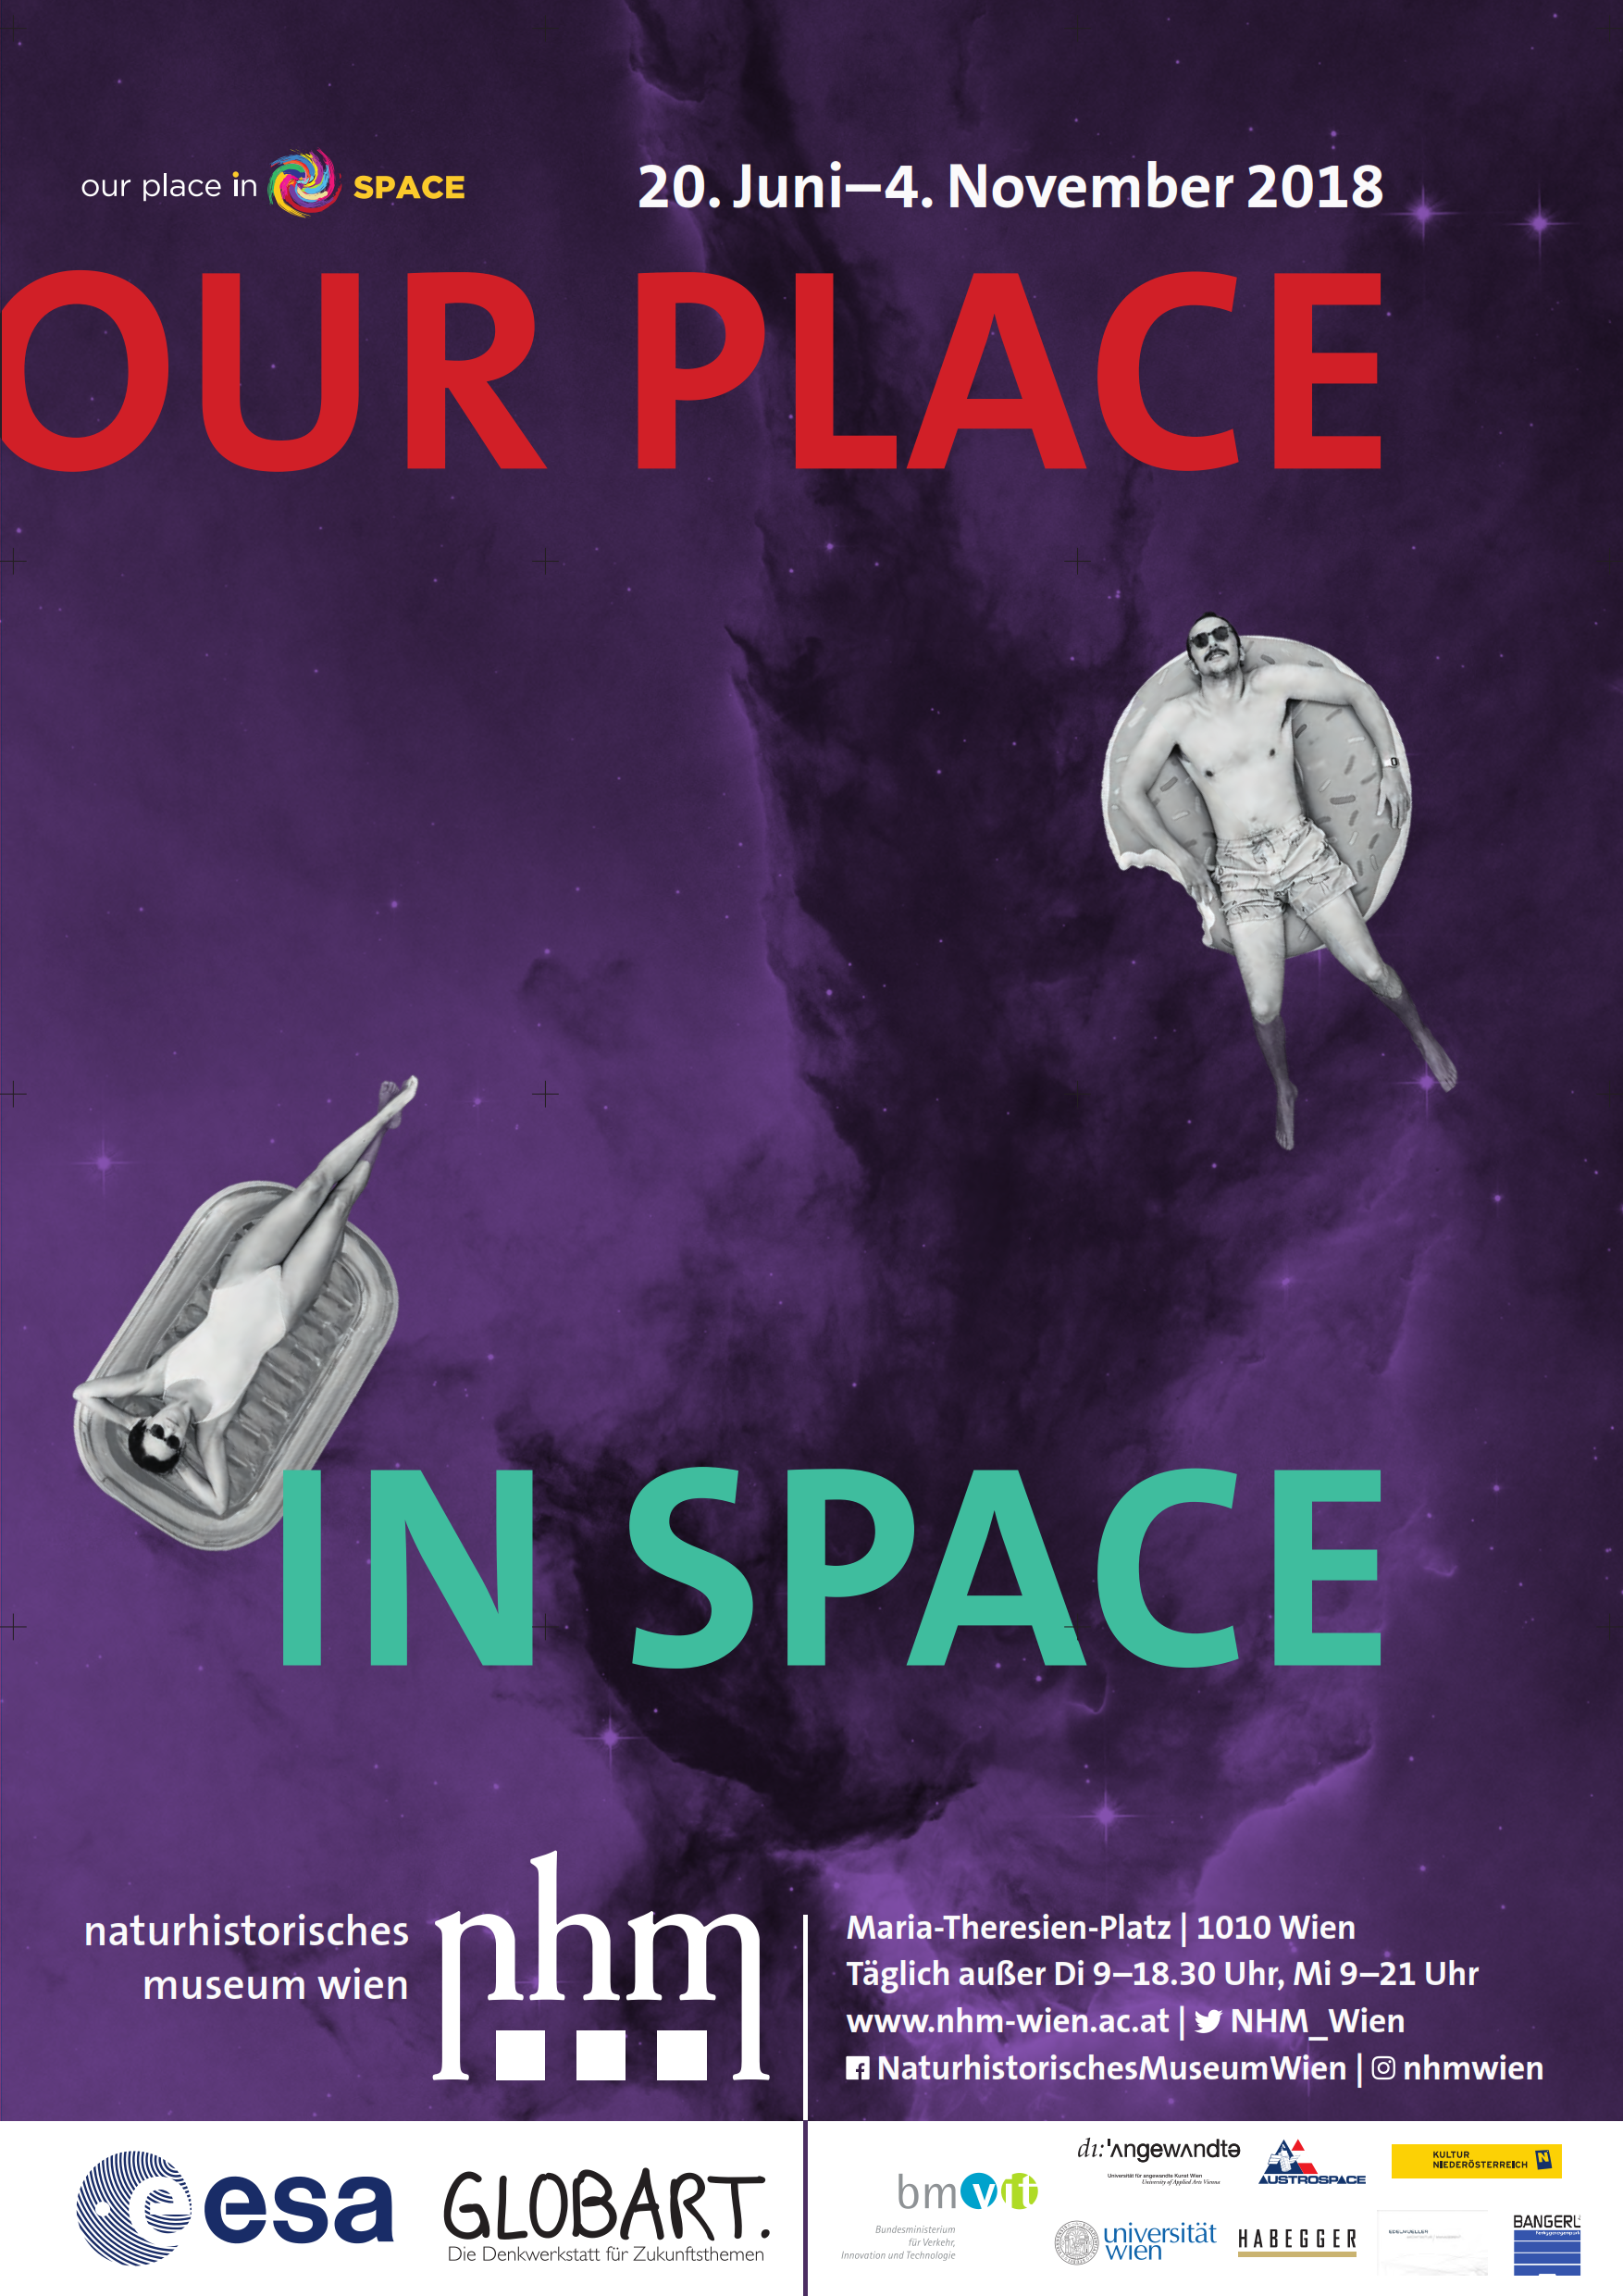

Official poster of Our Place in Space Vienna

This is the official poster of the Hubble travelling exhibition Our Place in Space, Vienna edition.

Credit: Natural History Museum Vienna